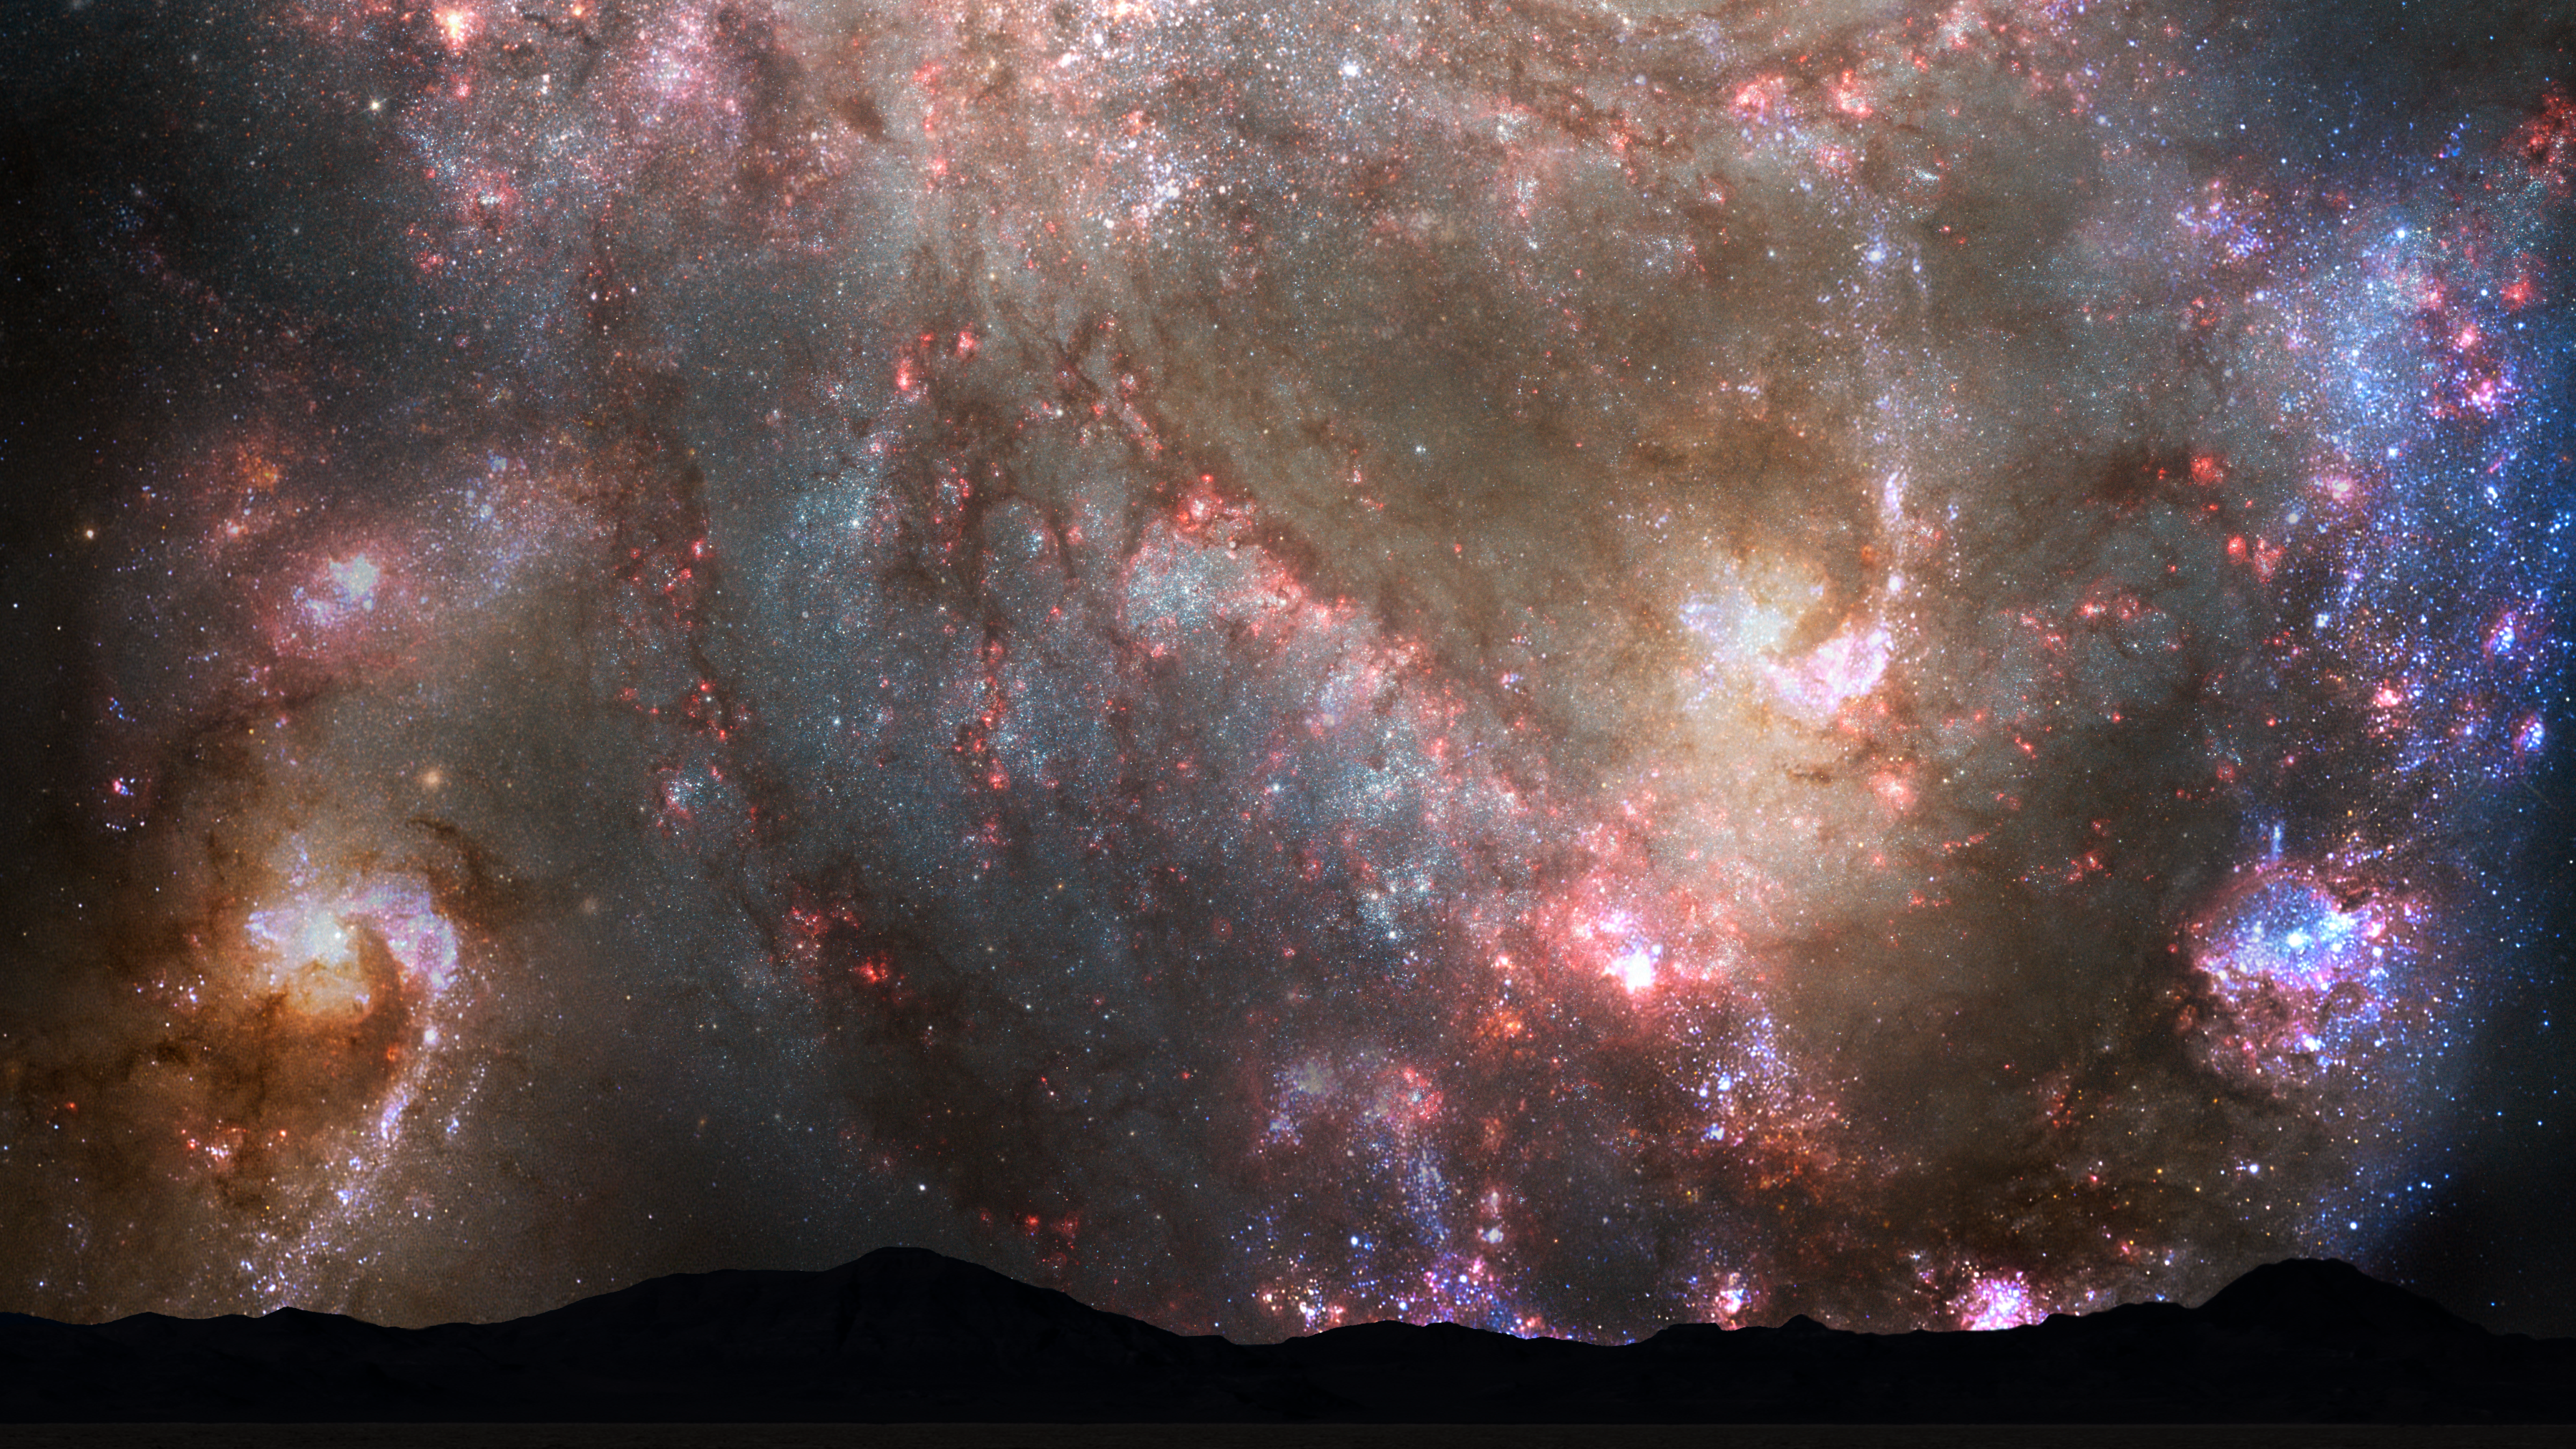

Nighttime Sky View of Future Galaxy Merger: 3.85-3.9 Billion Years

During the first close approach, the sky is ablaze with new star formation, which is evident in a plethora of emission nebulae and open young star clusters.

Credit: NASA, ESA, Z. Levay and R. van der Marel (STScI), T. Hallas, and A. Mellinger